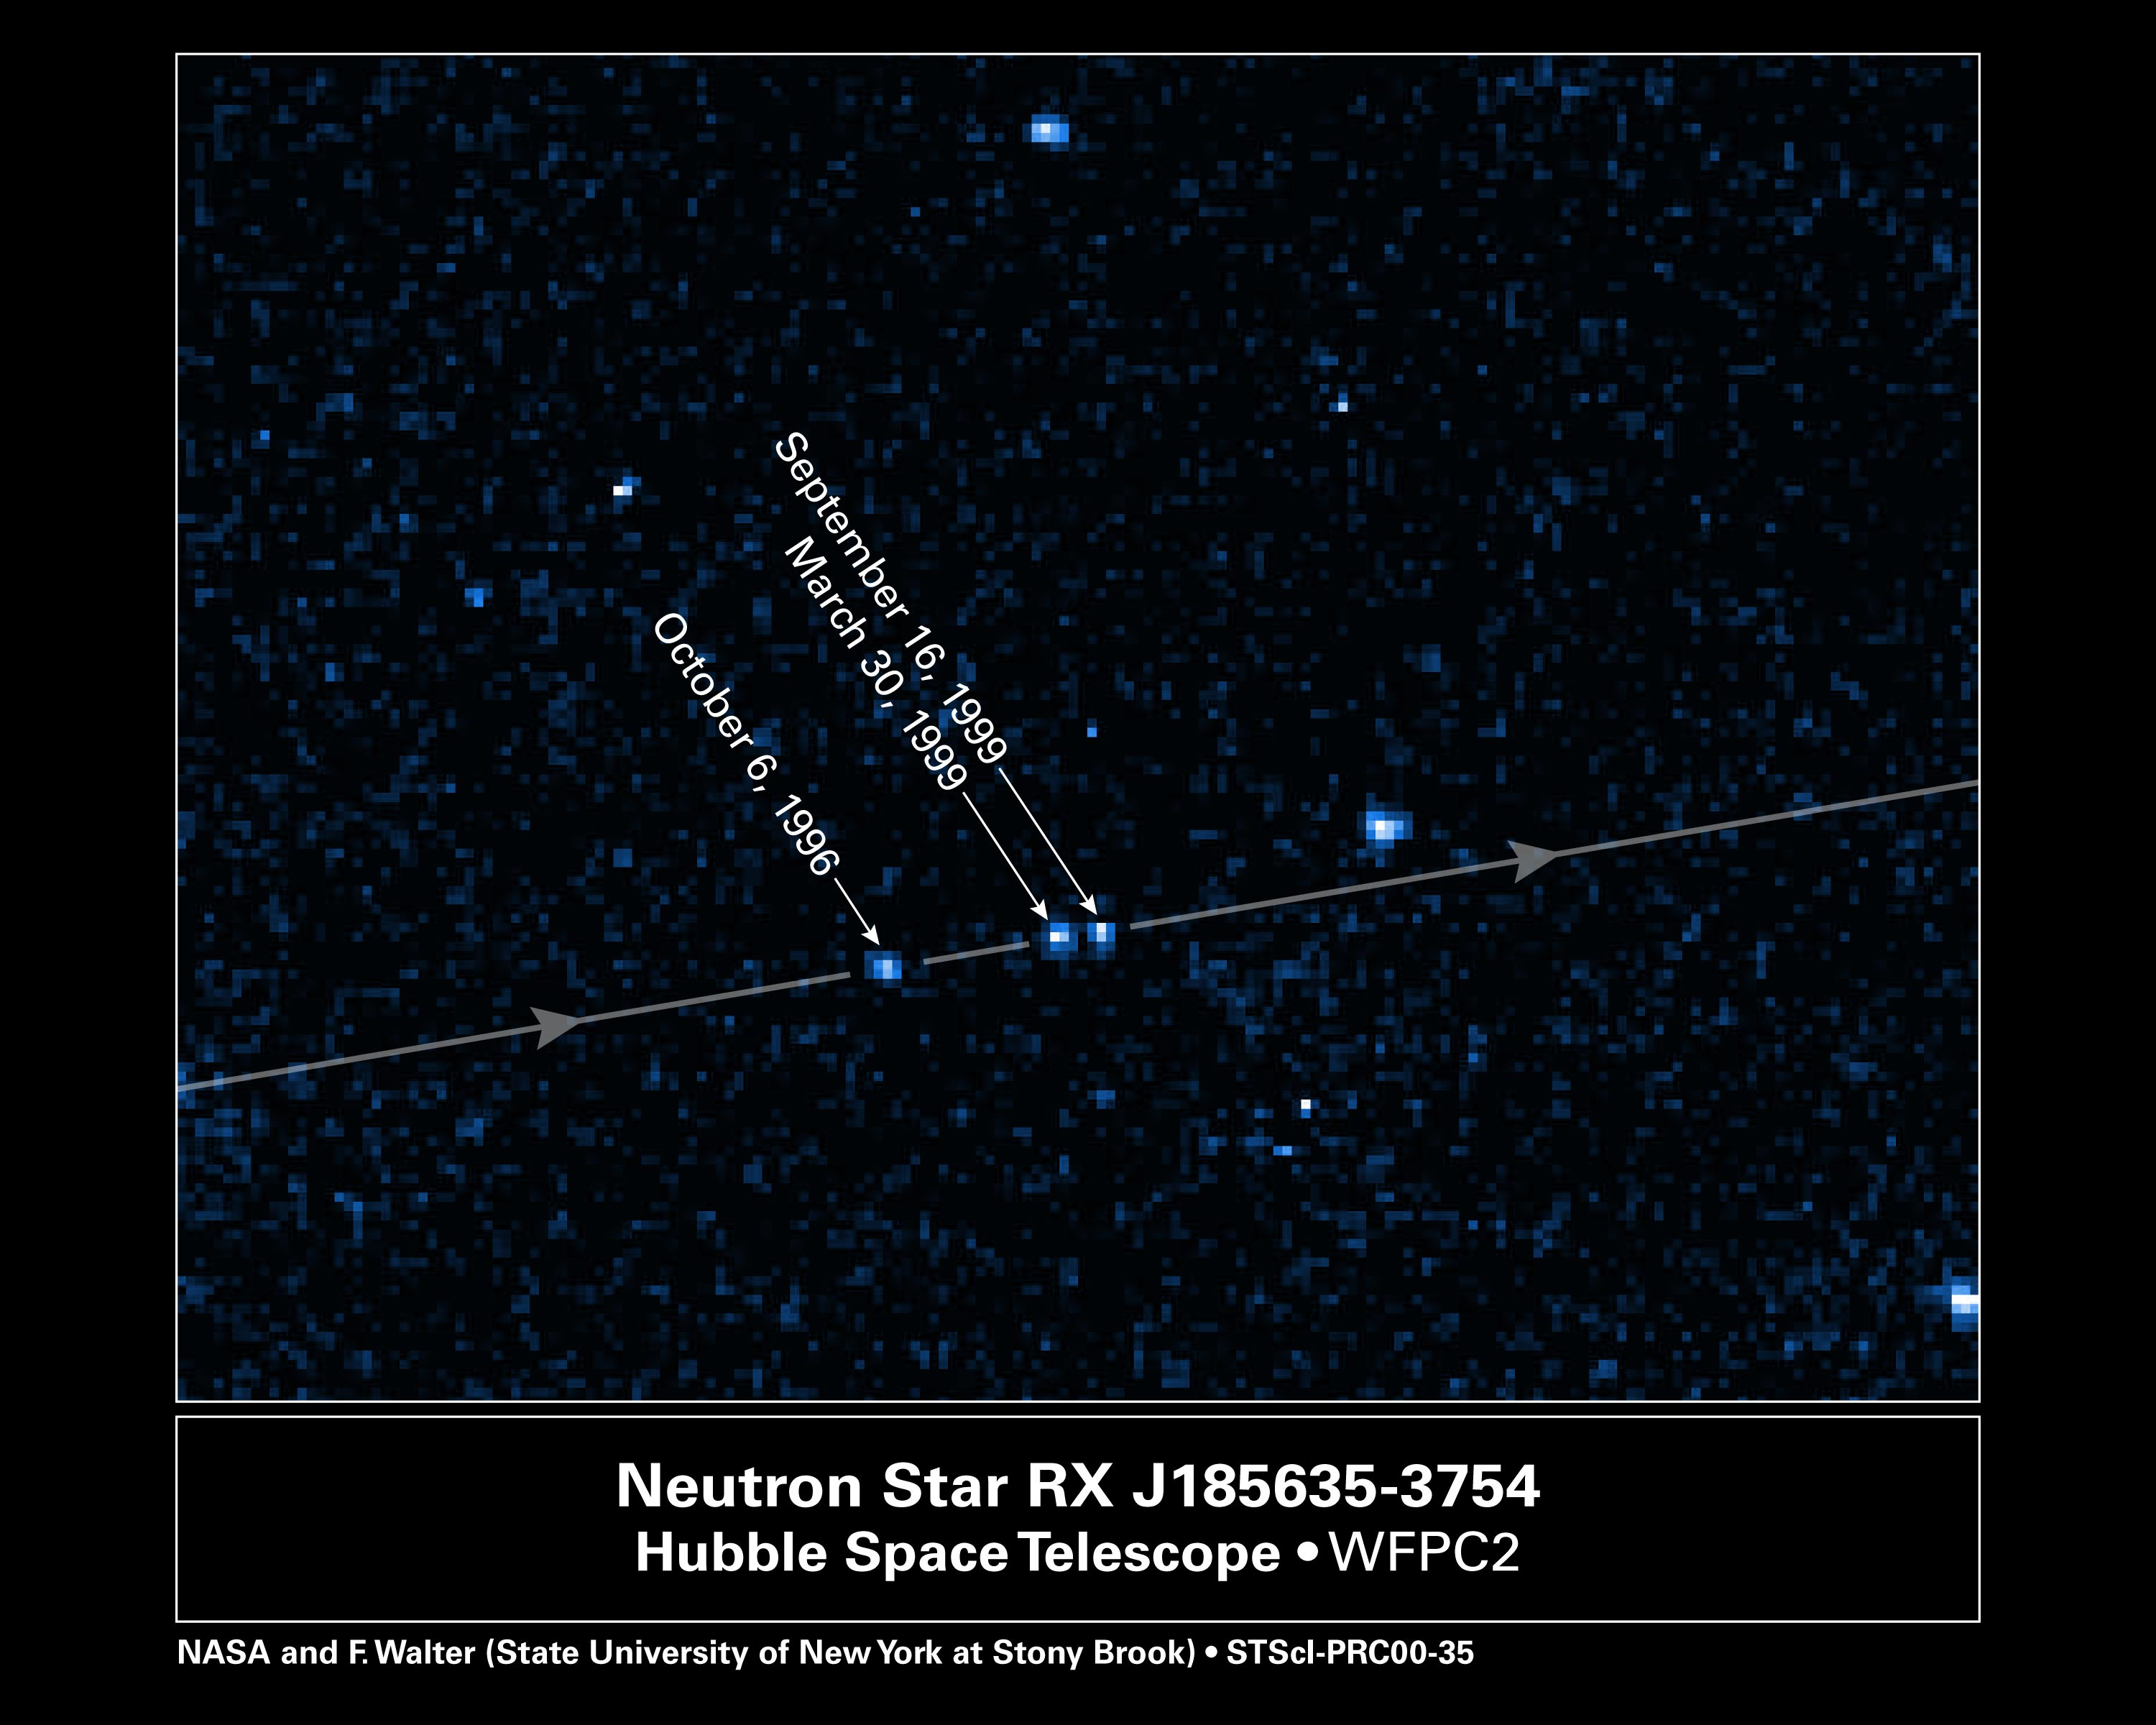

The Motion of RX J185635-3754 (with indication of dates)

This photograph is the sum of three Hubble Space Telescope images. North is down, east is to the right.

All stars line up in this composite picture, except the neutron star, which moves across the image in a direction 10 degrees south of east. The three images of the neutron star are labeled by date. The proper motion is 1/3 of a second of arc per year.

Credit: F.M. Walter (State University of New York at Stony Brook) and NASA/ESA